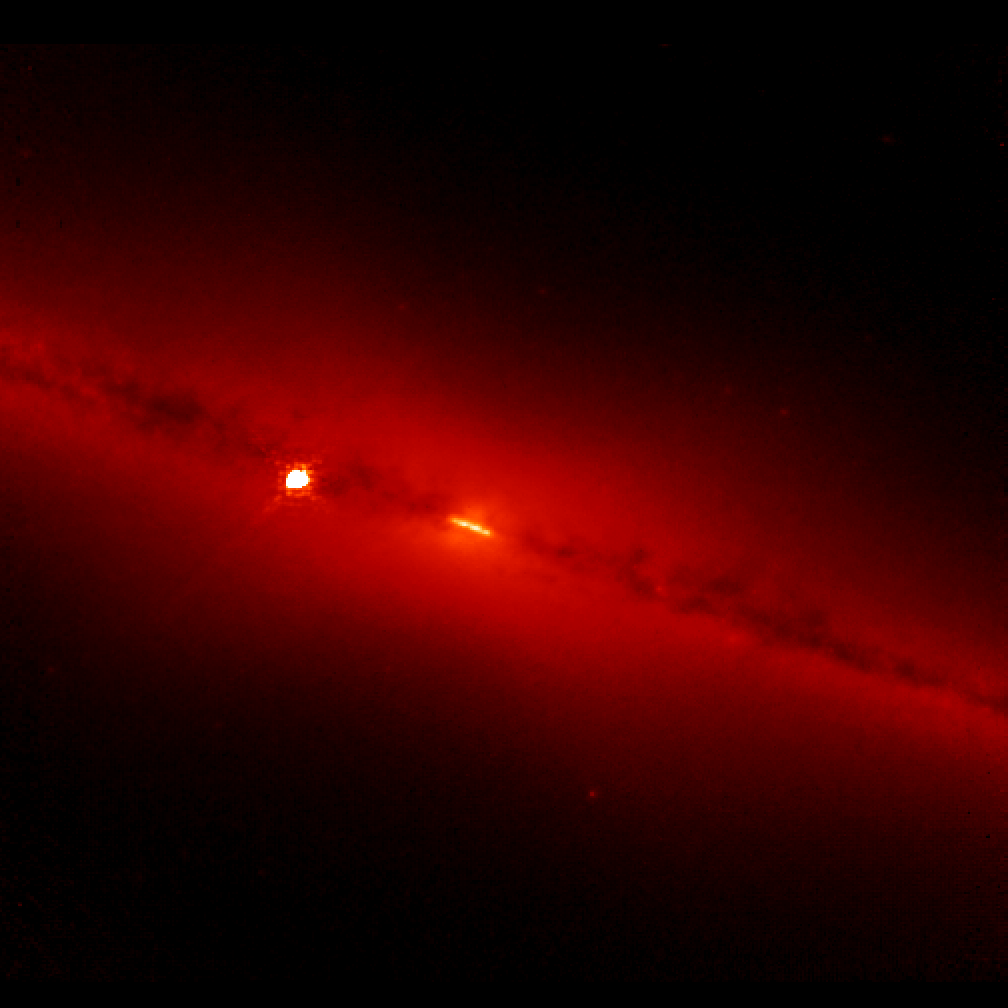

NICMOS finds a golden ring at the heart of a galaxy (NICMOS image)

The revived Near Infrared Camera and Multi-Object Spectrometer (NICMOS) aboard the NASA/ESA Hubble telescope has penetrated the dusty disc of the 'edge-on' galaxy NGC 4013 and looked right into the galactic core. To the surprise of astronomers, NICMOS found a brilliant band-like structure, that may be a ring of newly formed stars seen edge-on.

NICMOS enables the Hubble telescope to see near-infrared wavelengths of light, so that it can penetrate the dust that obscures the inner hub of the galaxy. The ring-like structure seen by NICMOS encircles the core and is about 720 light-years wide, which is the typical size of most star-forming rings found in disc galaxies.

The human eye cannot see infrared light so colours have been assigned to correspond to near-infrared wavelengths. The blue light represents shorter near-infrared wavelengths and the red light corresponds to longer wavelengths.

This picture, taken with a filter sensitive to hydrogen, shows the glow of stars and gas. Astronomers used this information to calculate the rate of star formation in the ring-like structure.

NGC 4013, which looks similar to our Milky Way Galaxy, resides in the constellation Ursa Major, 55 million light-years from Earth.

This image, obtained on 12 May 2002, was taken through the Paschen-alpha filter.

Credit: NASA, ESA, the NICMOS Group (STScI, ESA) and the NICMOS Science Team (Univ. of Arizona)